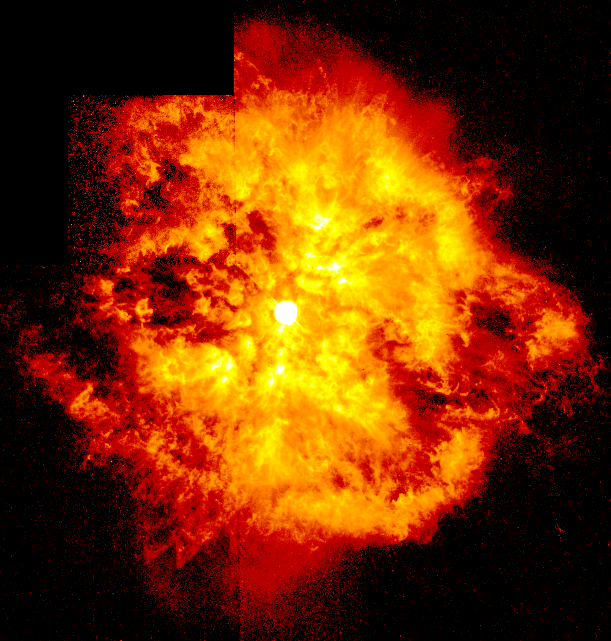

Great Balls of Fire! Hubble Sees Bright Knots Ejected from Brilliant Star

Resembling an aerial fireworks explosion, this dramatic NASA/ESA Hubble Space Telescope picture of the energetic star WR124 reveals it is surrounded by hot clumps of gas being ejected into space at speeds of over 100, 000 miles per hour (approx. 45 kilometres per second).

Credit: Yves Grosdidier (University of Montreal and Observatoire de Strasbourg), Anthony Moffat (Universitie de Montreal), Gilles Joncas(Universite Laval), Agnes Acker (Observatoire de Strasbourg), and NASA/ESA